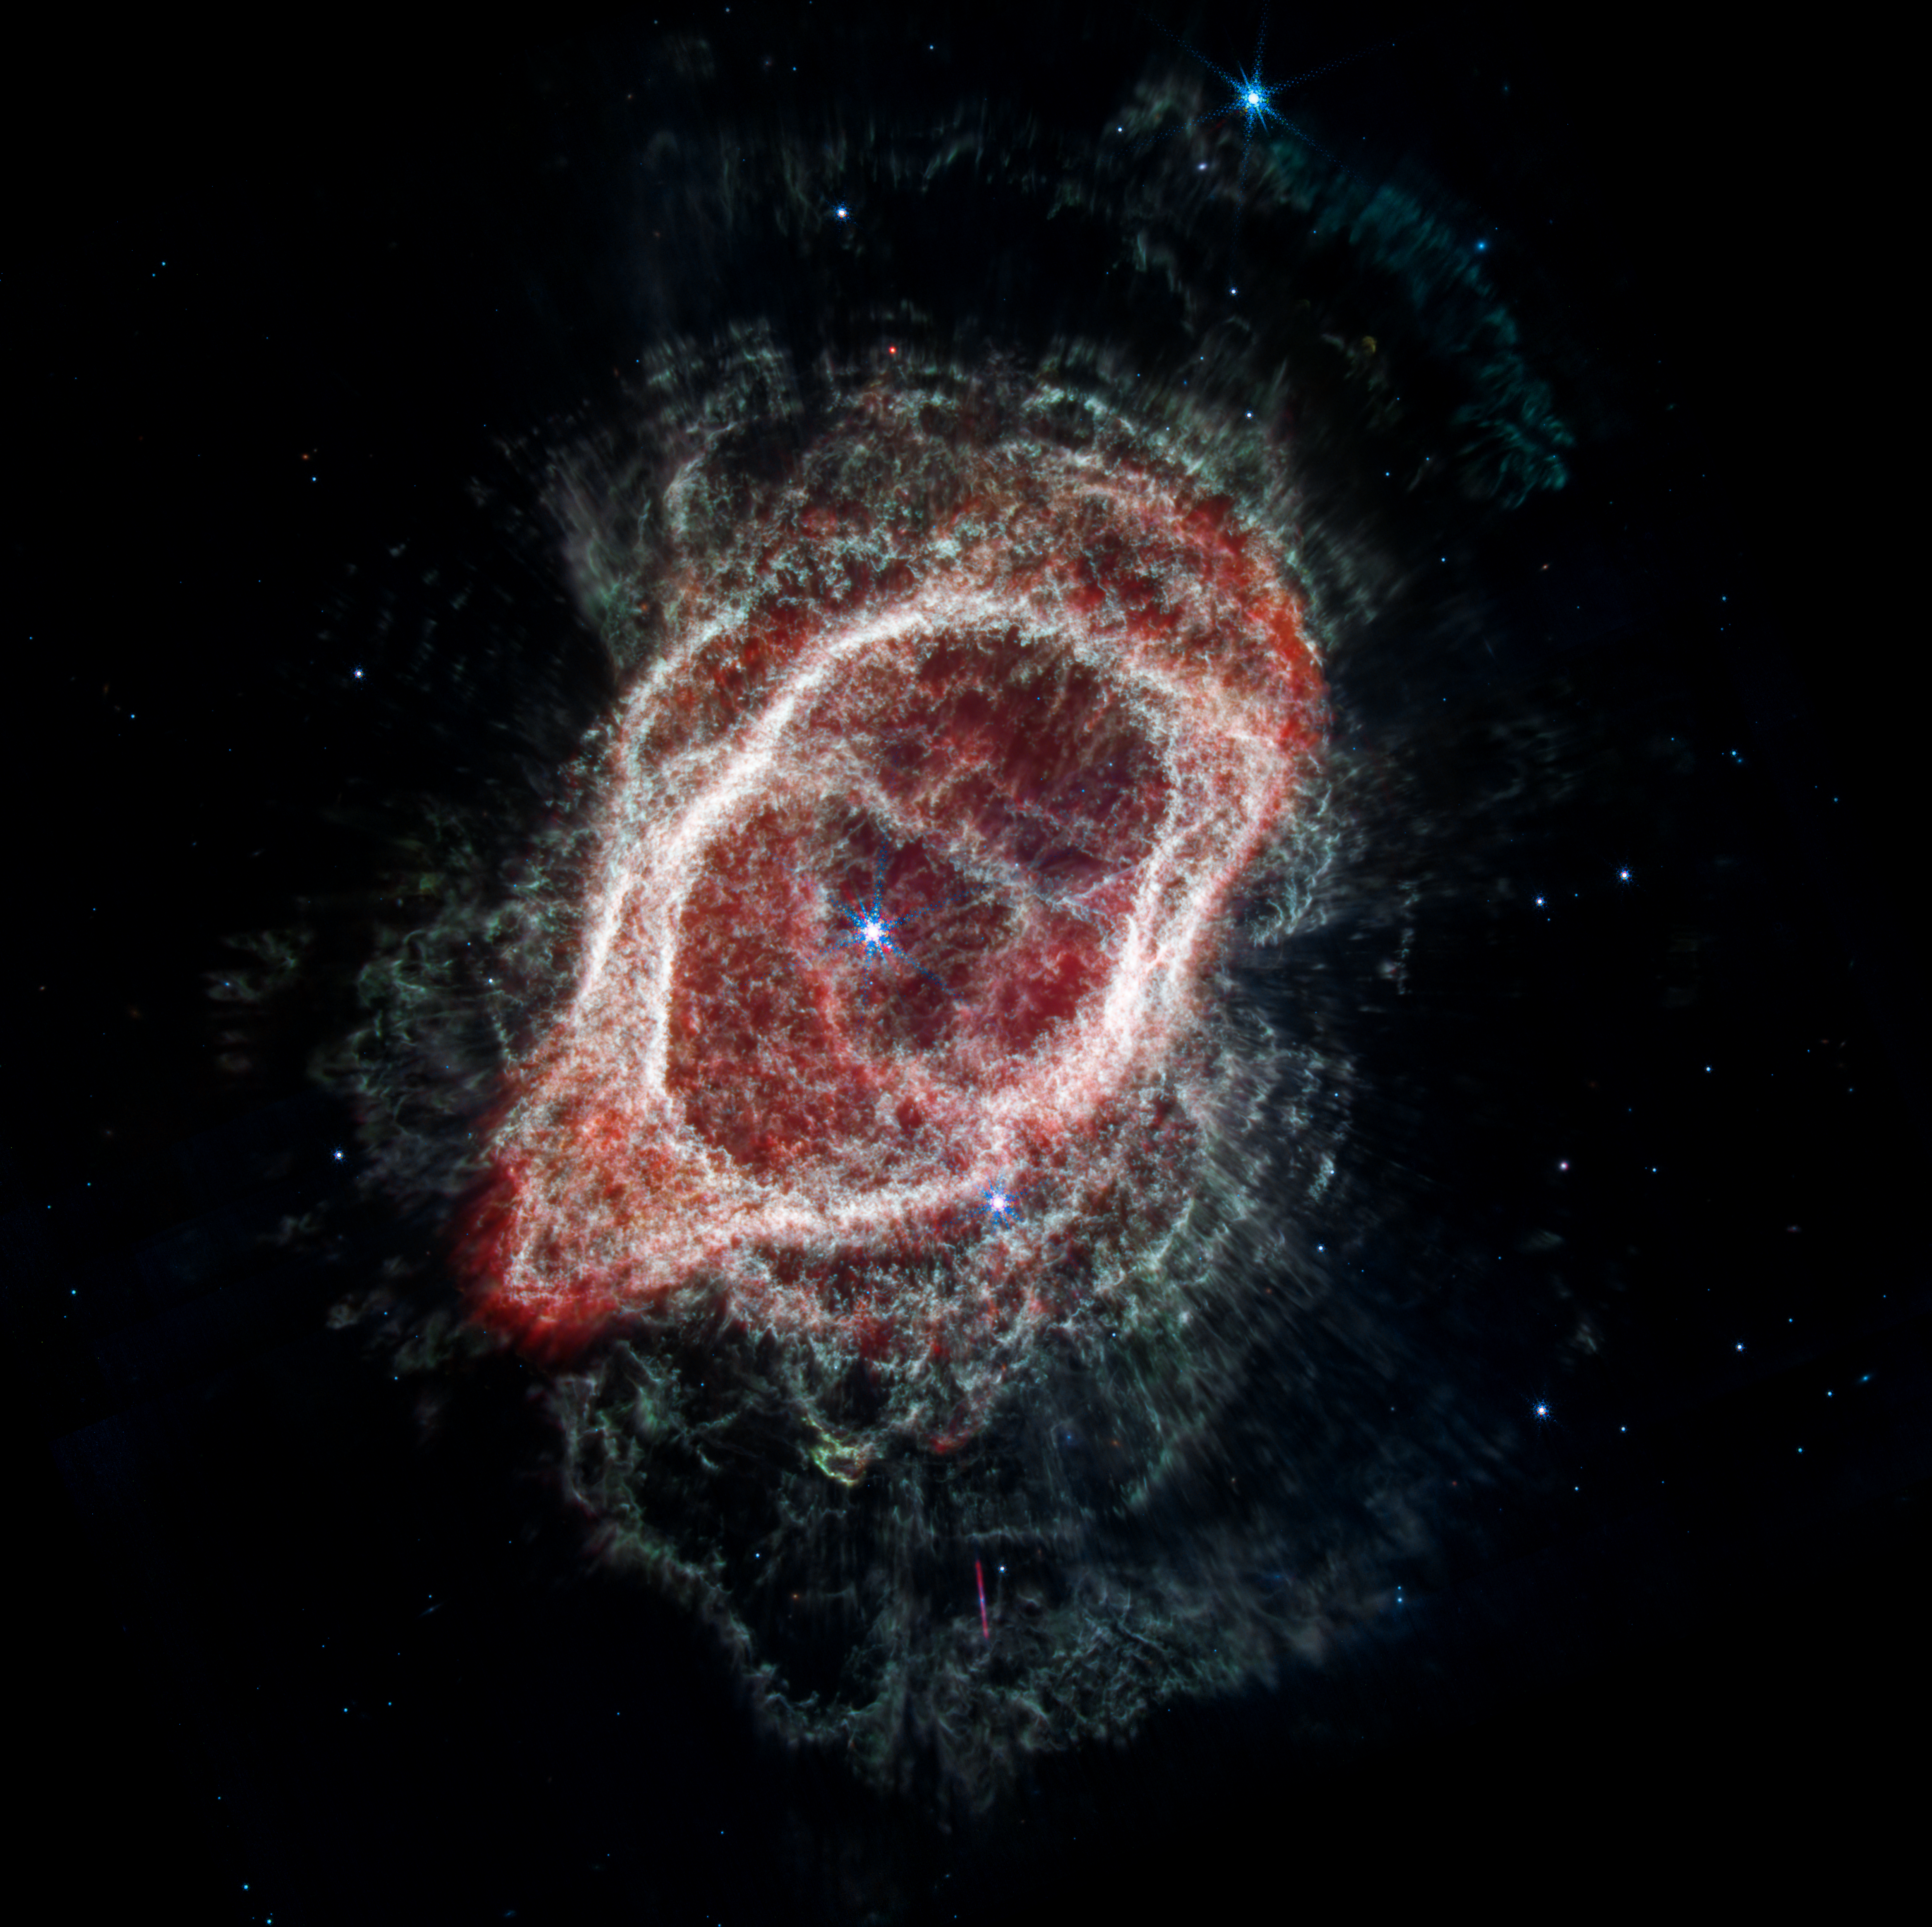

Southern Ring Nebula’s Spokes (NIRCam and MIRI Composite Image)

This is an image of the Southern Ring Nebula (NGC 3132), captured by the NASA/ESA/CSA James Webb Space Telescope’s Near-Infrared Camera (NIRCam) and Mid-Infrared Instrument (MIRI). The image combines near- and mid-infrared light from three filters.

Webb’s image traces the star’s scattered outflows that have reached farther into the cosmos. Most of the molecular gas that lies outside the band of cooler gas is also cold. It is also far clumpier, consisting of dense knots of molecular gas that form a halo around the central stars.

Credit: NASA, ESA, CSA, STScI, O. De Marco (Macquarie University), J. DePasquale (STScI)